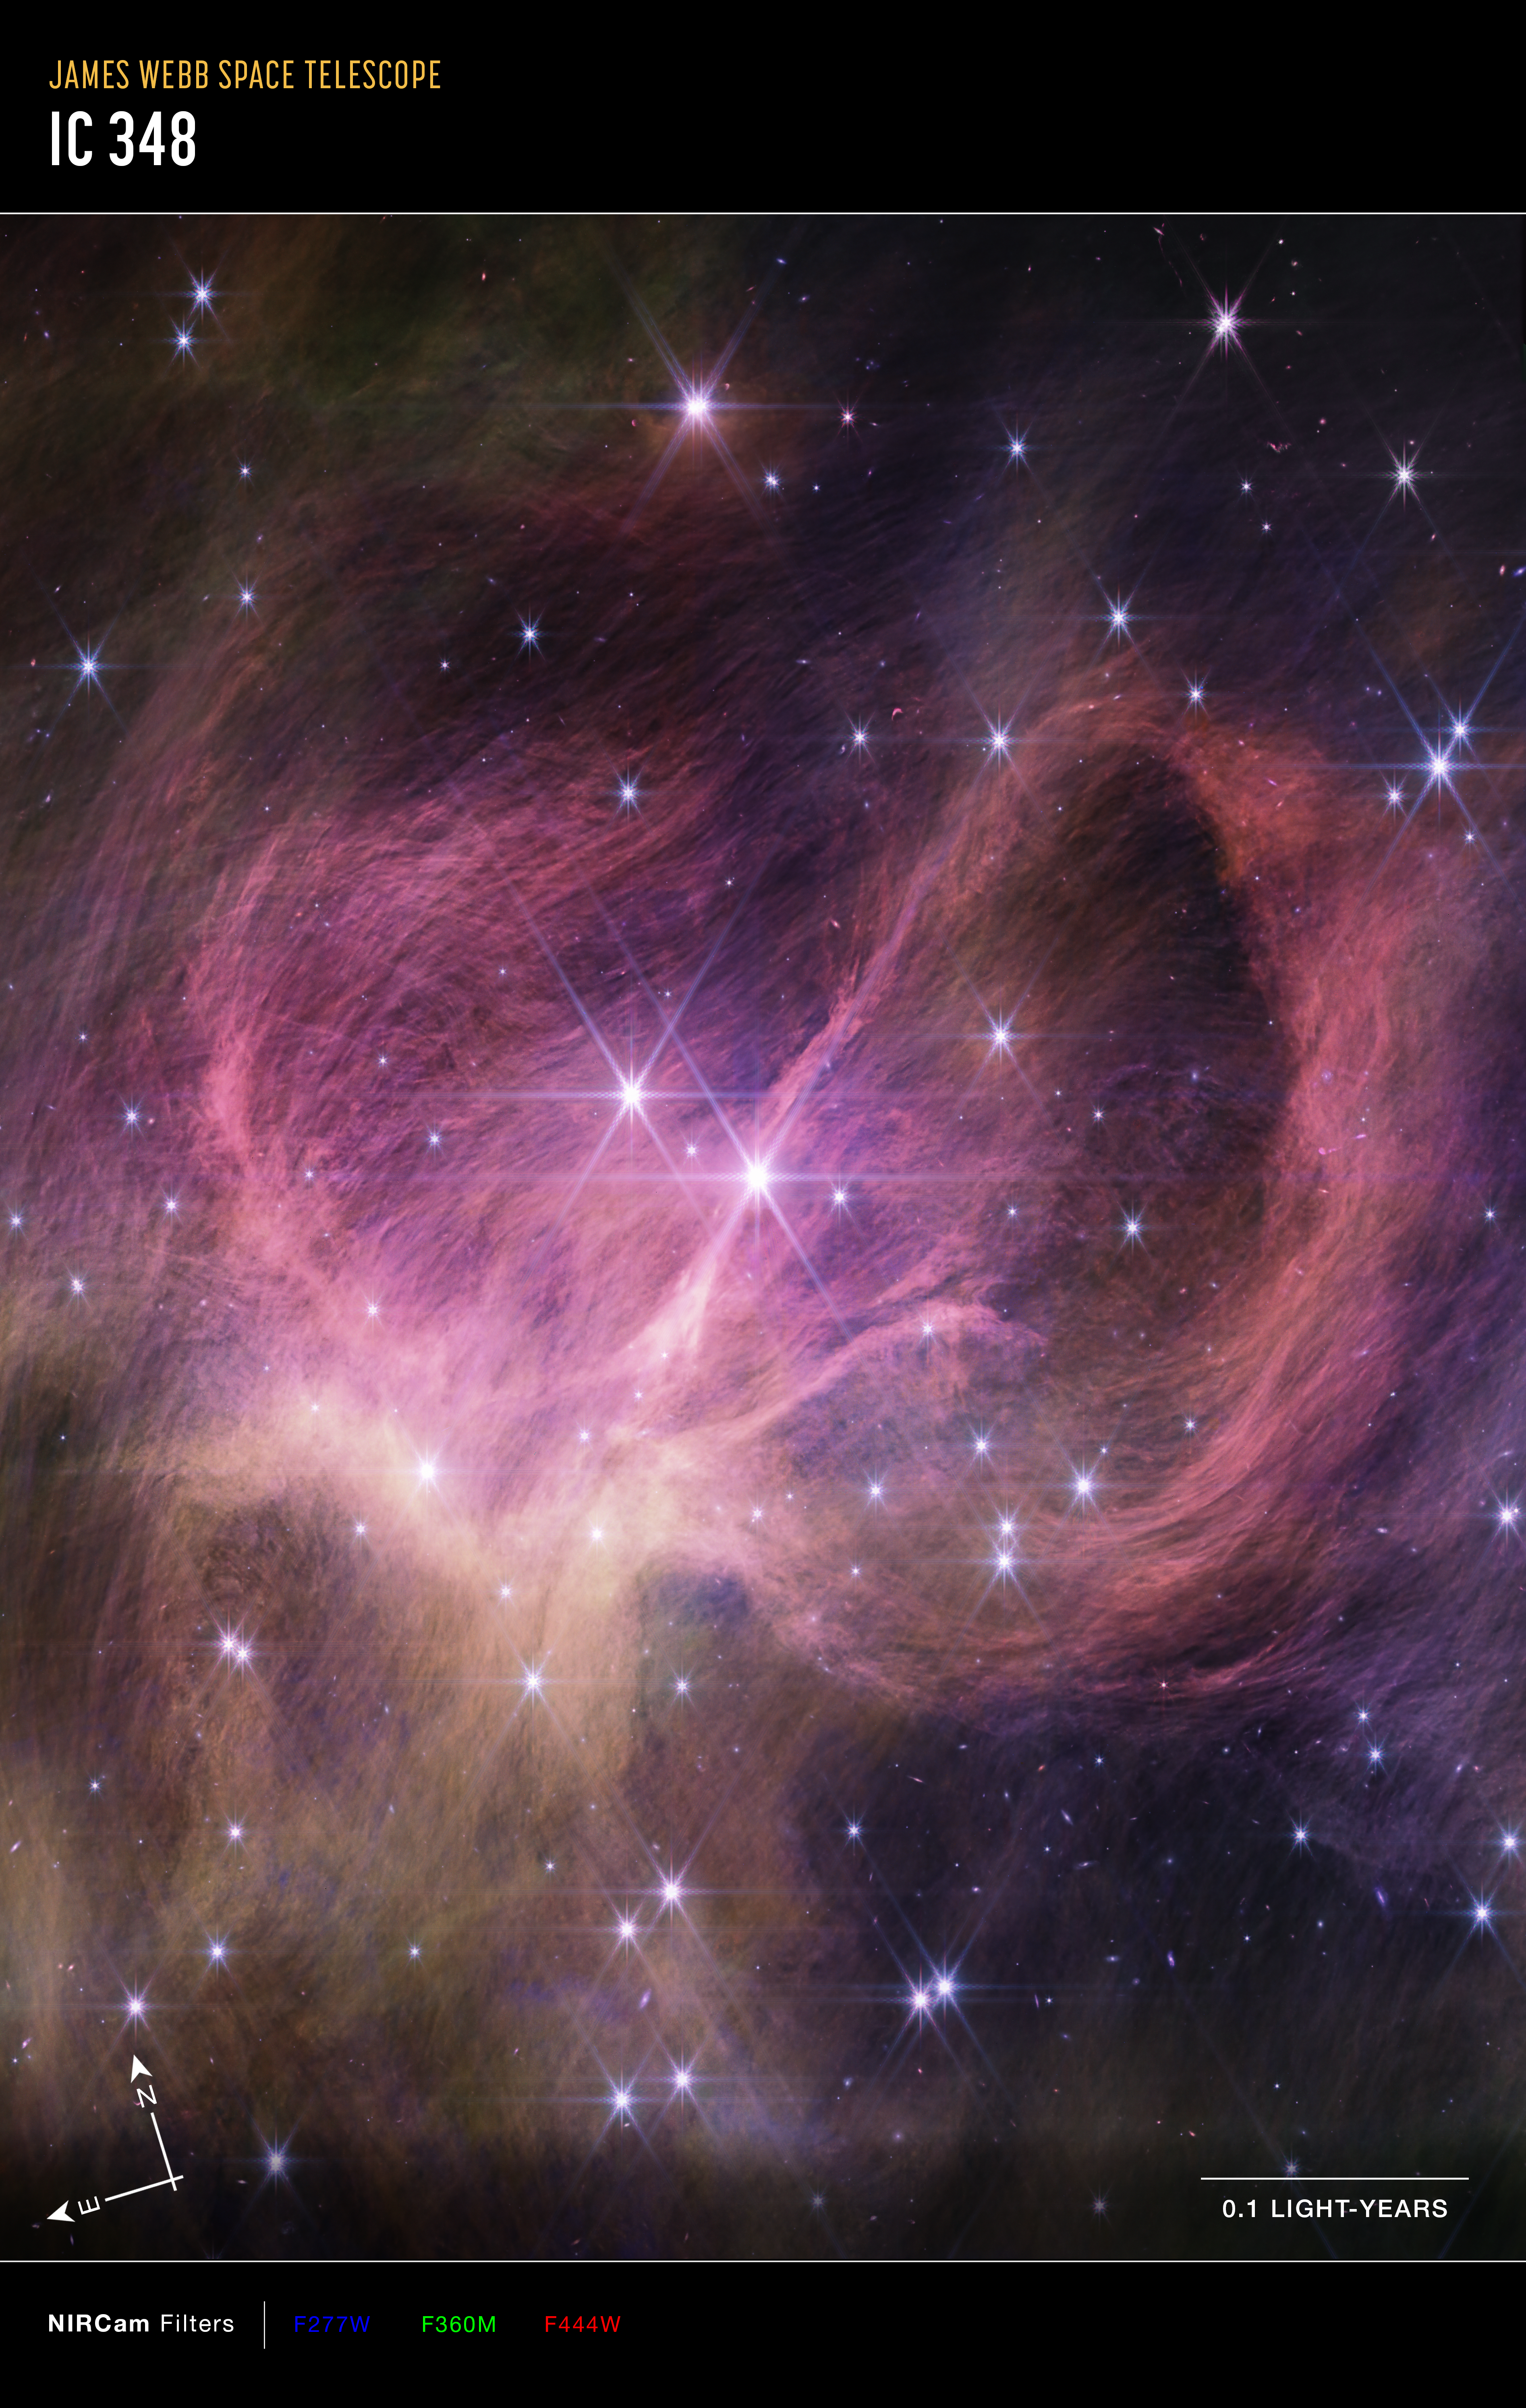

Star Cluster IC 348 (NIRCam compass image)

This image of star cluster IC 348, captured by Webb’s NIRCam (Near-Infrared Camera) instrument, shows compass arrows, a scale bar, and a colour key for reference.

The north and east compass arrows show the orientation of the image on the sky. Note that the relationship between north and east on the sky (as seen from below) is flipped relative to direction arrows on a map of the ground (as seen from above).

The scale bar is labelled in light-years, which is the distance that light travels in one Earth-year. (It takes 0.1 years for light to travel a distance equal to the length of the scale bar.) One light-year is equal to about 5.88 trillion miles or 9.46 trillion kilometres. The field of view shown in this image is approximately 0.5 light-years across and 0.8 light-years high.

This image shows invisible near-infrared wavelengths of light that have been translated into visible-light colours. The colour key shows which NIRCam filters were used when collecting the light. The colour of each filter name is the visible light colour used to represent the infrared light that passes through that filter.

Credit: NASA, ESA, CSA, STScI, and K. Luhman (Penn State University) and C. Alves de Oliveira (European Space Agency)